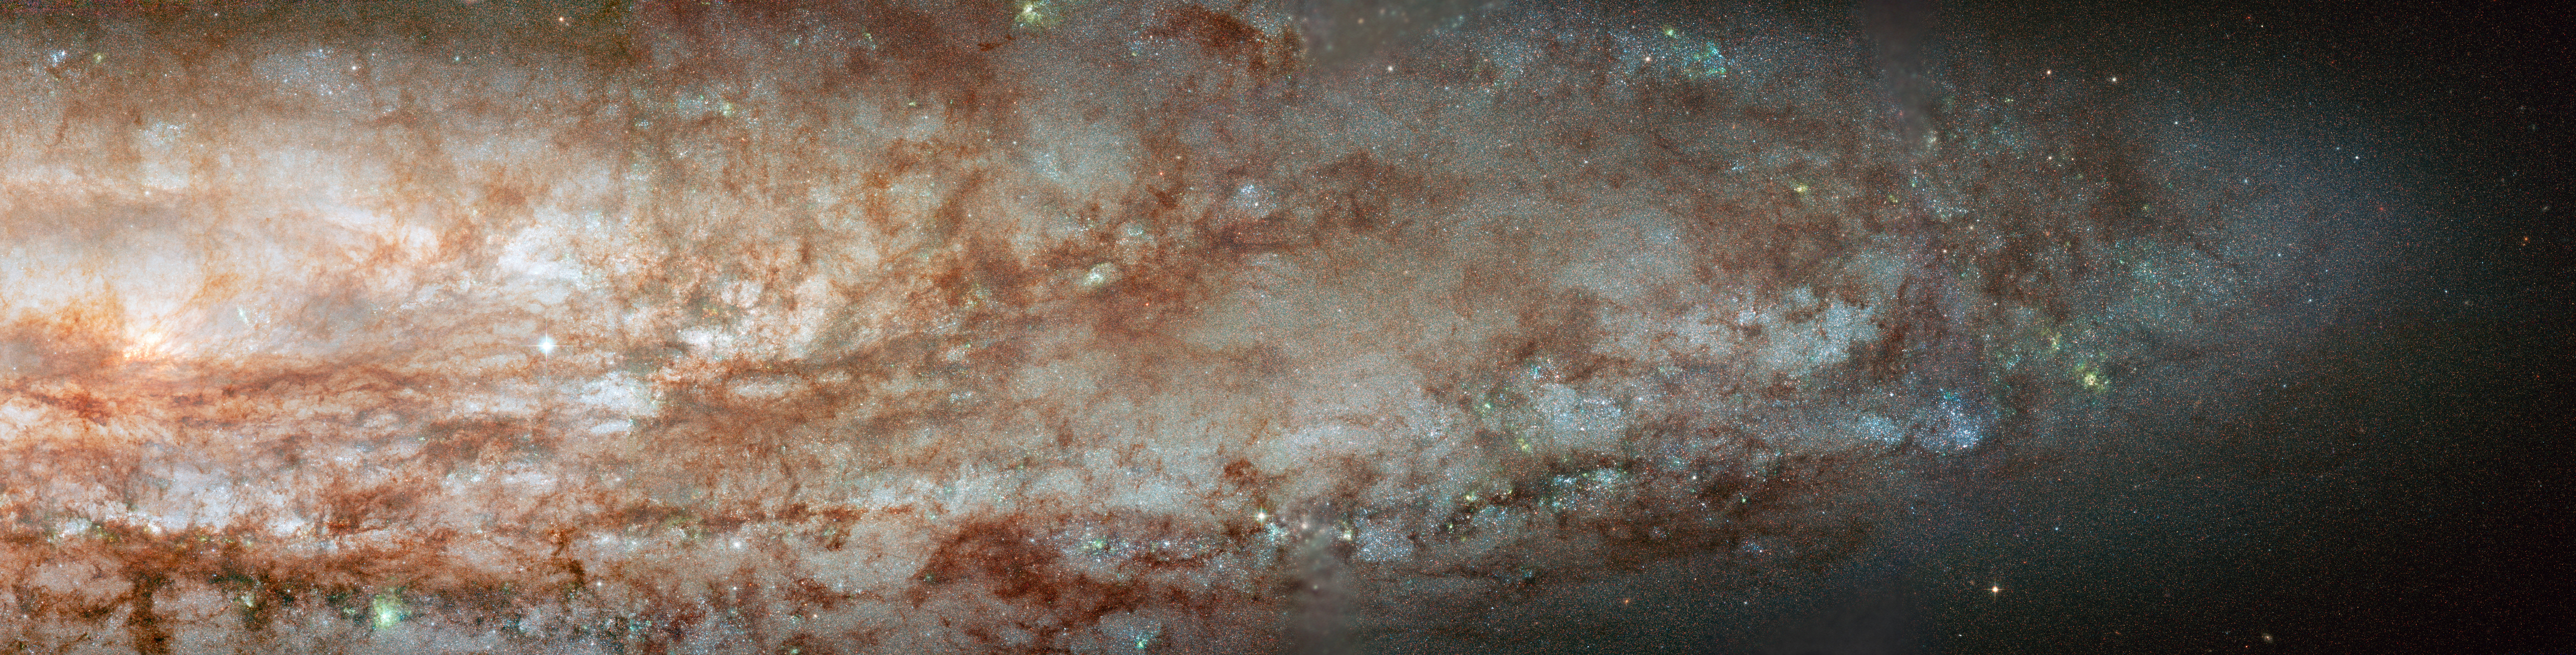

NGC 253

NGC 253 is one of brightest spiral galaxies in the night sky, easily visible with small telescopes, and it is composed of thousands of young, blue stars. It is undergoing intense star formation. The image demonstrates the sharp "eye" of Hubble's Advanced Camera for Surveys, which is able to show individual stars. The dark filaments are clouds of dust and gas. NGC 253 is the dominant galaxy in the Sculptor Group of galaxies and it resides about 13 million light-years from Earth.

Credit: NASA, ESA, J. Dalcanton and B. Williams (University of Washington), T.A. Rector/University of Alaska Anchorage, T. Abbott and NOAO/AURA/NSF